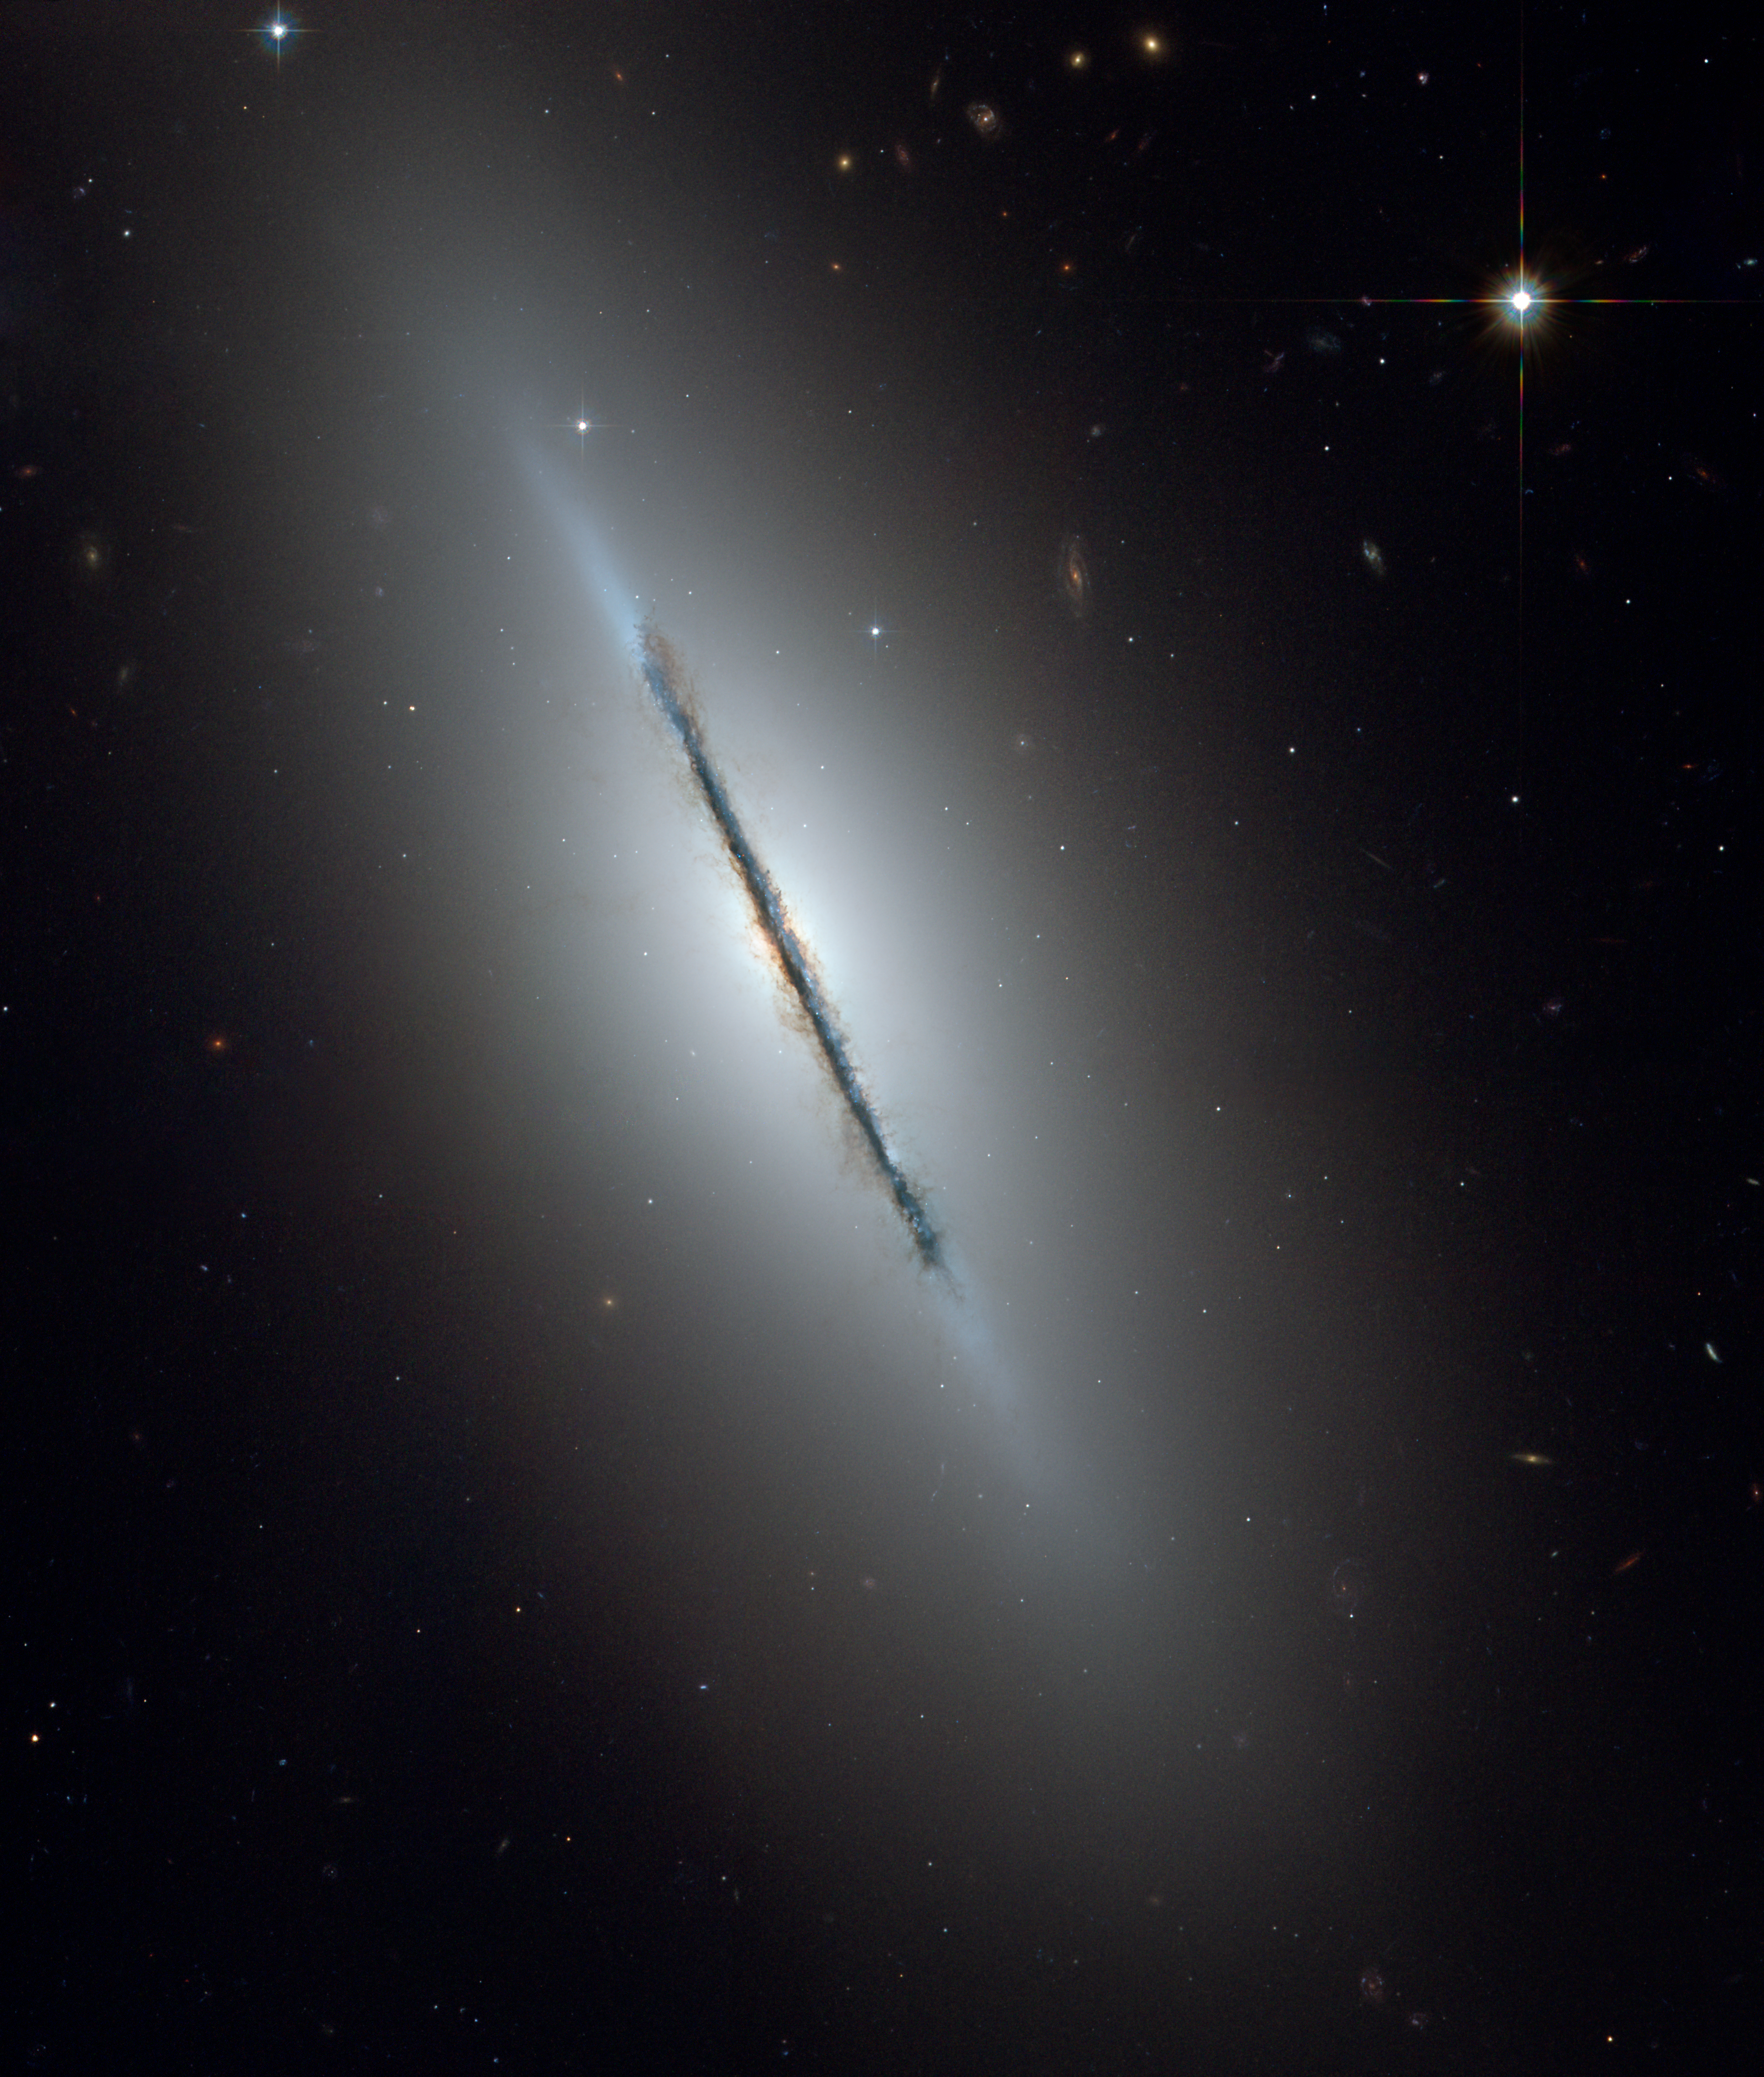

ACS image of NGC 5866

This is a unique NASA/ESA Hubble Space Telescope view of the disk galaxy NGC 5866 tilted nearly edge-on to our line-of-sight.

Hubble's sharp vision reveals a crisp dust lane dividing the galaxy into two halves. The image highlights the galaxy's structure: a subtle, reddish bulge surrounding a bright nucleus, a blue disk of stars running parallel to the dust lane, and a transparent outer halo.

Some faint, wispy trails of dust can be seen meandering away from the disk of the galaxy out into the bulge and inner halo of the galaxy. The outer halo is dotted with numerous gravitationally bound clusters of nearly a million stars each, known as globular clusters. Background galaxies that are millions to billions of light-years farther away than NGC 5866 are also seen through the halo.

Credit: NASA, ESA, and The Hubble Heritage Team (STScI/AURA)